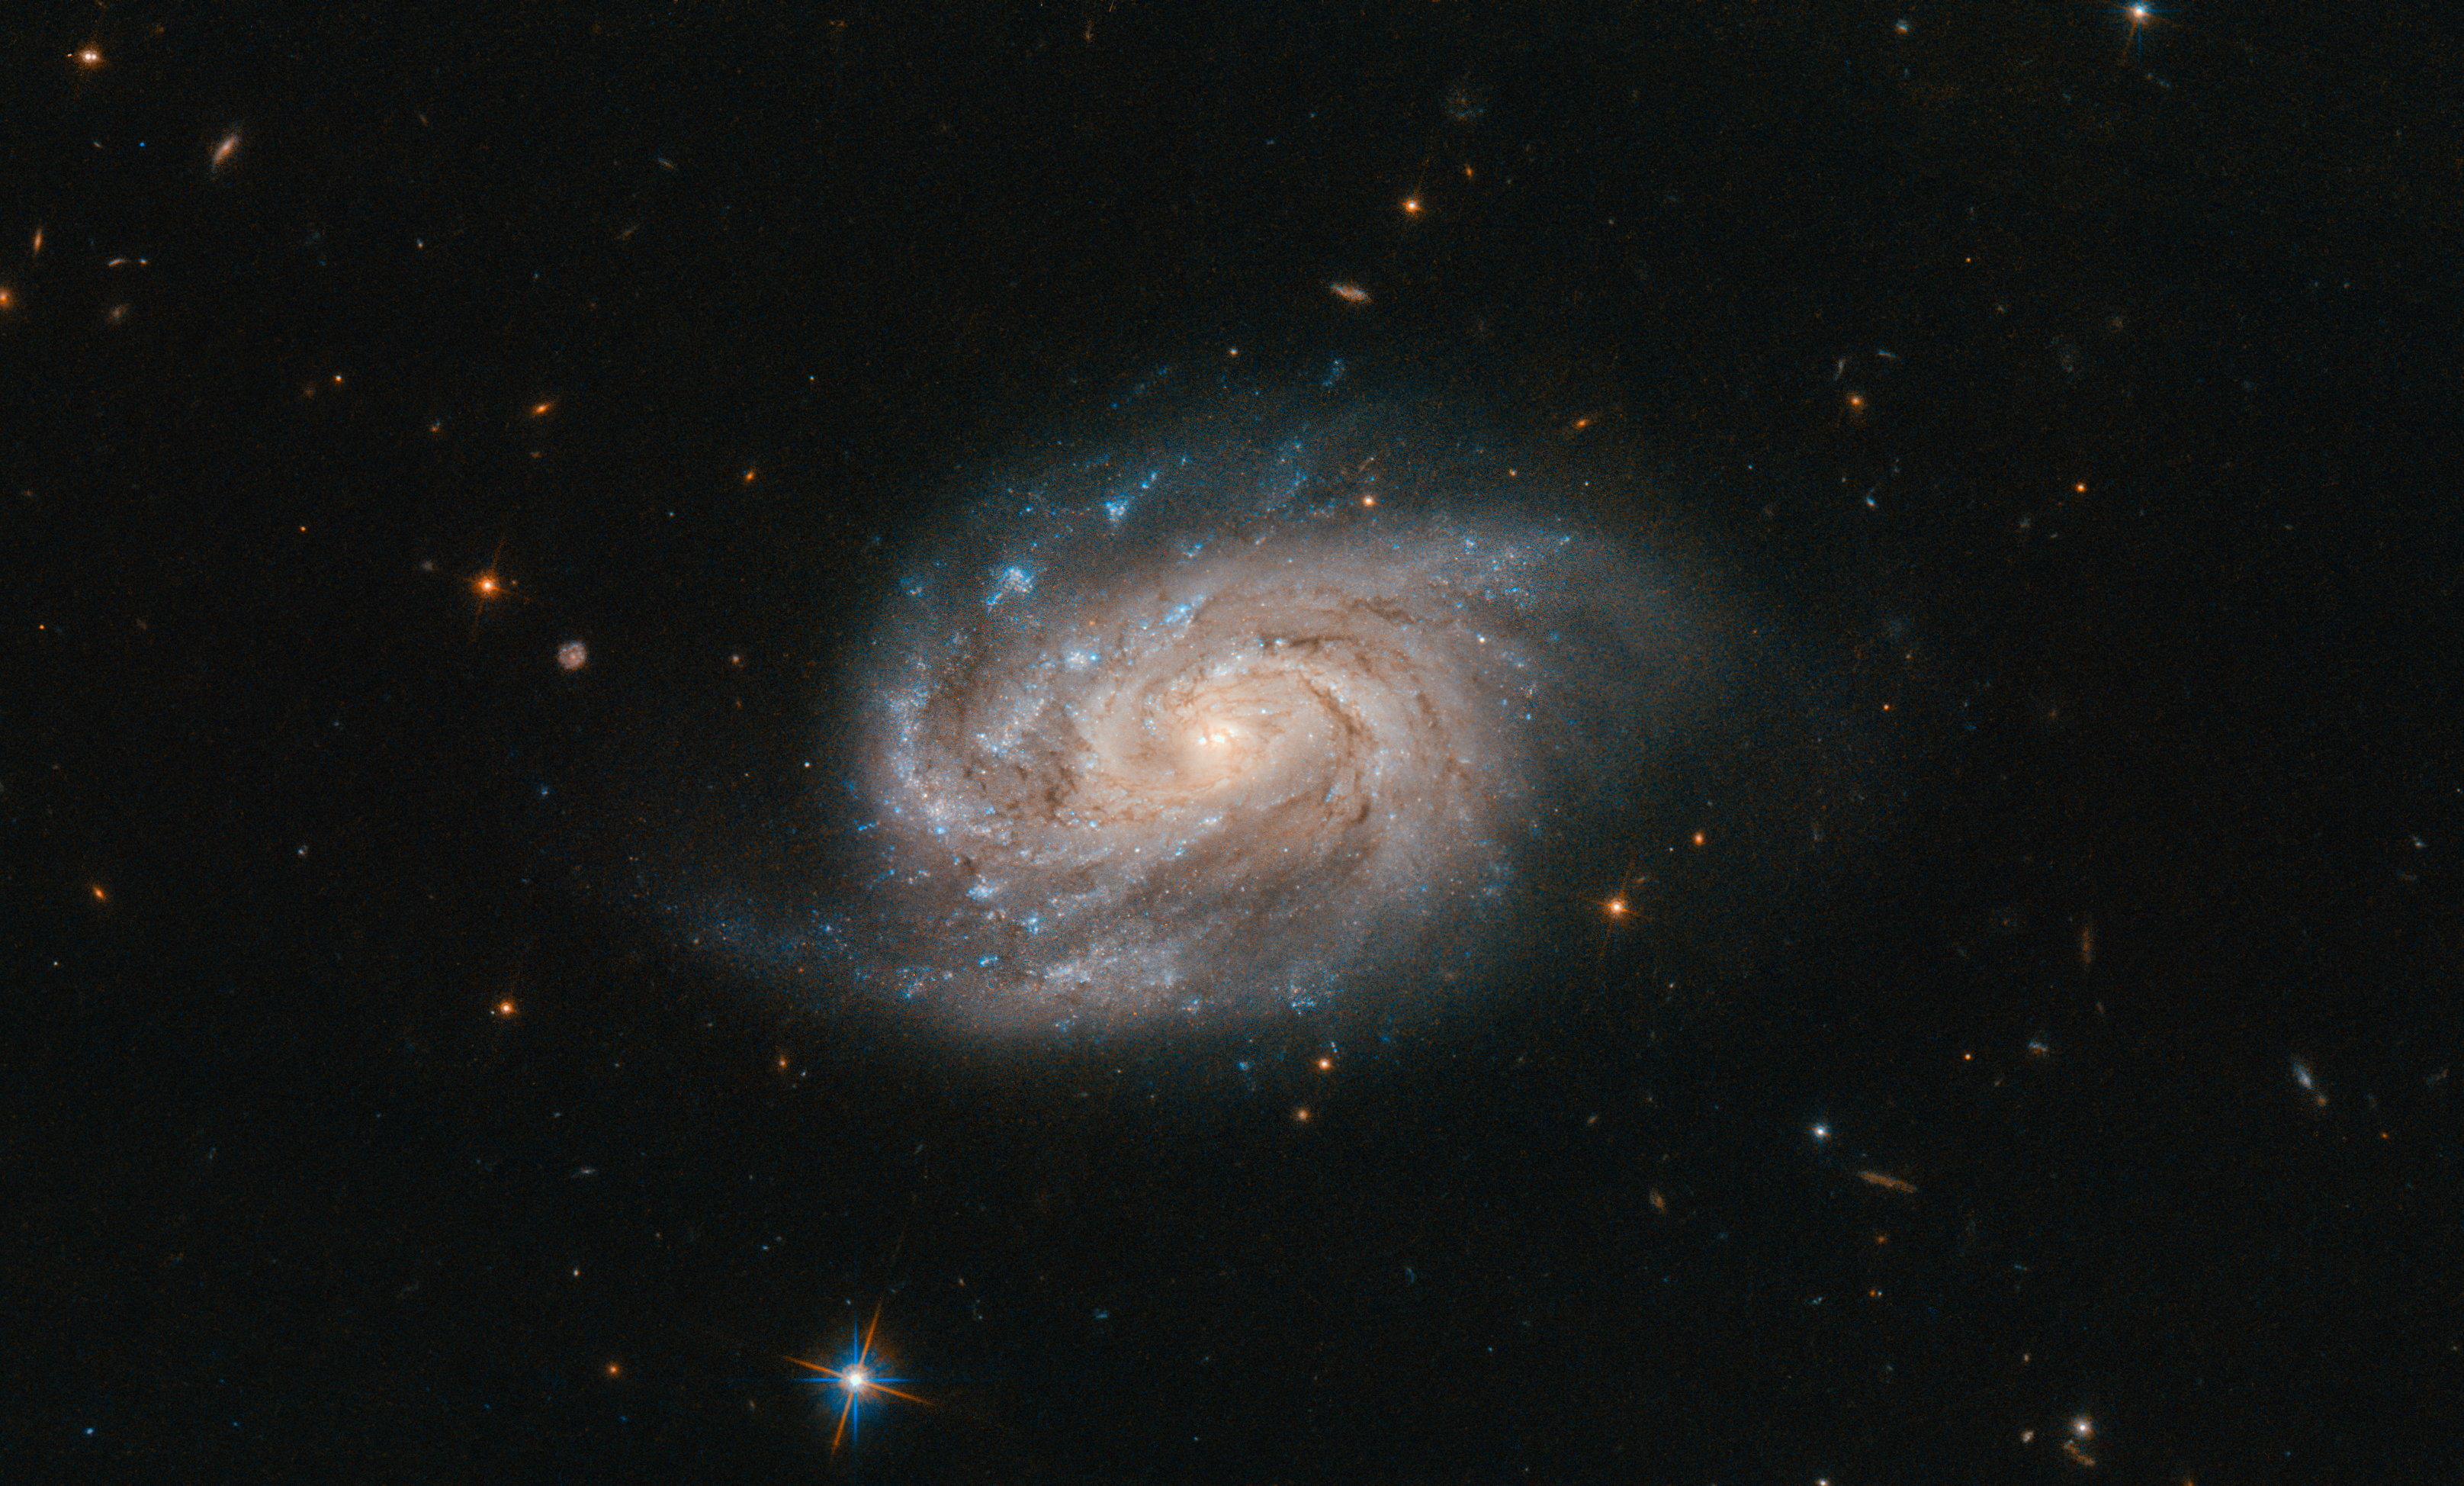

Catalogues Galore

This bright, somewhat blob-like object — seen in this Picture of the Week as observed by the NASA/ESA Hubble Space Telescope — is a galaxy named NGC 1803. It is about 200 million light-years away, in the southern constellation of Pictor (The Painter’s Easel).

NGC 1803 was discovered in 1834 by astronomer John Herschel. Herschel is a big name in astronomy; John, his father William, and his aunt Caroline all made huge contributions to the field, and their legacies remain today. William systematically catalogued many of the objects he viewed in the night sky, named many moons in the Solar System, discovered infrared radiation, and more. Caroline discovered several comets and nebulae. John took this aforementioned catalogue of night-sky objects and reworked and expanded it into his General Catalogue of Nebulae and Clusters of Stars. This was the basis for the cataloguing system still used today by astronomers (Dreyer’s New General Catalogue of Nebulae and Clusters of Stars, or the New General Catalogue for short).

This gives rise to the NGC names assigned to a vast number of galaxies — including NGC 1803. This galaxy is one of a galactic pair. It was described by Dreyer as being “faint, small, [and] round”, and located near to a very bright star to the southeast. This star is in fact the nebulous lenticular galaxy PGC 16720 — not visible in this image.

Credit: ESA/Hubble & NASA, A. Bellini et al.